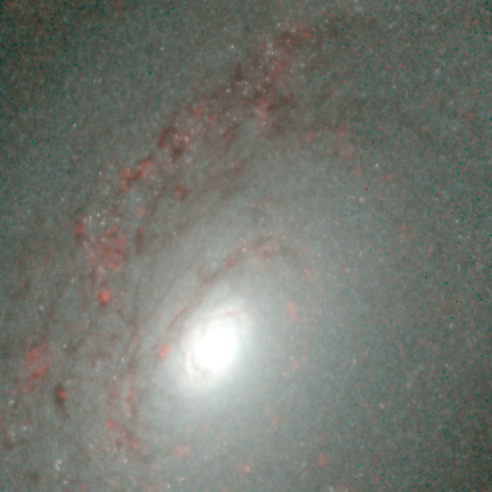

Hubble's Infrared Galaxy Gallery. A View of NGC 4826

Astronomers have used the NASA/ESA Hubble Space Telescope to produce an infrared 'photo essay' of spiral galaxies. By penetrating the dust clouds swirling around the centers of these galaxies, the telescope’s infrared vision is offering fresh views of star birth.

Credit: Torsten Boeker, Space Telescope Science Institute, and NASA/ESA